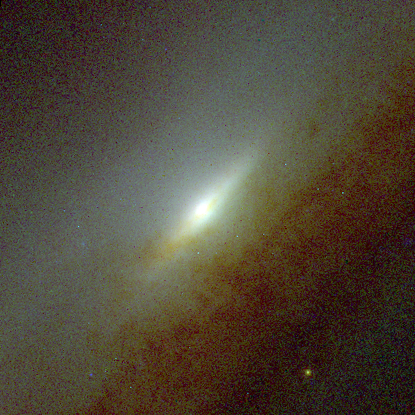

Central bulges of piral galaxies - NGC 5965 (Hubble NICMOS and WFPC2 view)

This image represents composite pictures from Hubble's visible- and infrared-light cameras, the Wide Field and Planetary Camera 2(WFPC2) and the Near Infrared Camera and Multi-Object Spectrometer(NICMOS). Astronomers combined views from both cameras to obtain the true ages of the stars surrounding each galaxy's bulge. The Hubble telescope's sharper resolution allows astronomers to study the intricate structure of a galaxy's core.

Credit: NASA, ESA, and Reynier Peletier (University of Nottingham, United Kingdom)